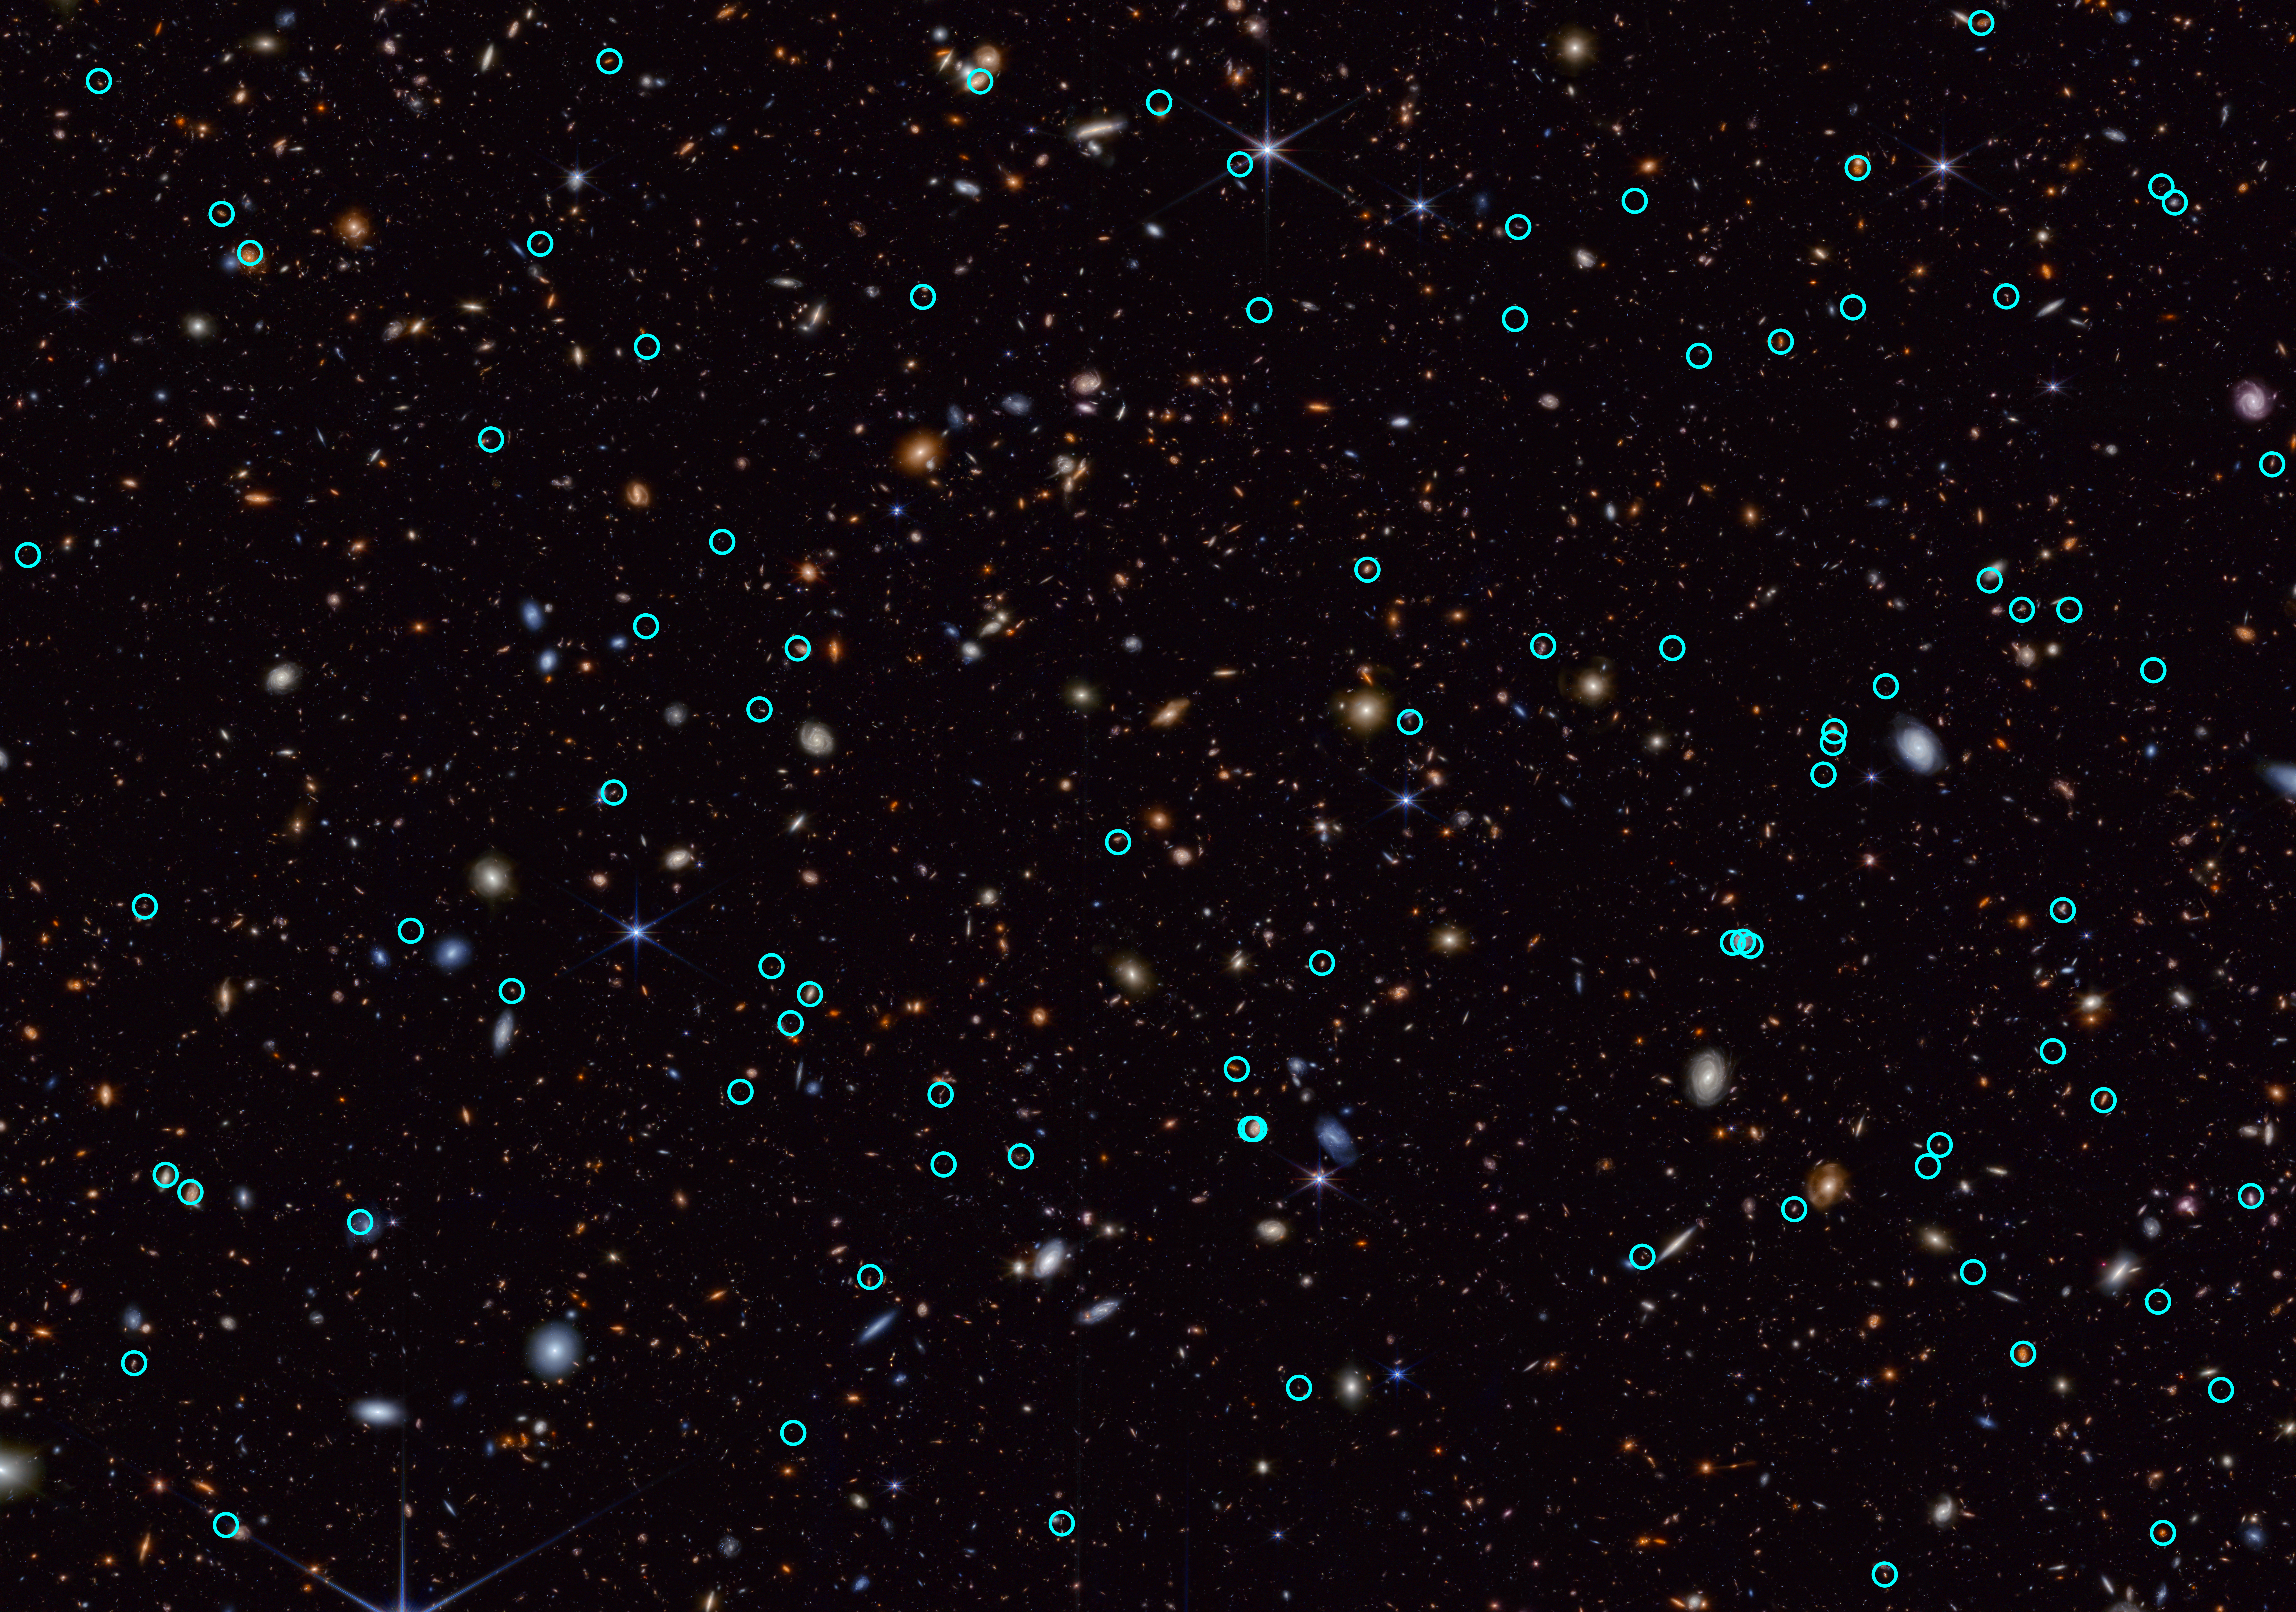

Transients in JADES field

The NASA/ESA/CSA James Webb Space Telescope is giving scientists their first detailed glimpse of supernovae from a time when our Universe was just a small fraction of its current age. A team using Webb data has identified 10 times more supernovae in the early Universe than were previously known. A few of the newfound exploding stars are the most distant examples of their type, including those used to measure the universe’s expansion rate.

To make these discoveries, the team analyzed imaging data obtained as part of the JWST Advanced Deep Extragalactic Survey (JADES) program. Webb is ideal for finding extremely distant supernovae because their light is stretched into longer wavelengths — a phenomenon known as cosmological redshift.

Prior to Webb’s launch, only a handful of supernovae had been found above a redshift of 2, which corresponds to when the universe was only 3.3 billion years old — just 25% of its current age. The JADES sample contains many supernovae that exploded even further in the past, when the universe was less than 2 billion years old. Previously, researchers used the NASA/ESA Hubble Space Telescope to view supernovae from when the universe was in the “young adult” stage. With JADES, scientists are seeing supernovae when the universe was in its “teens” or “pre-teens.” In the future, they hope to look back to the “toddler” or “infant” phase of the universe.

To discover the supernovae, the team compared multiple images taken up to one year apart and looked for sources that disappeared or appeared in those images. These objects that vary in observed brightness over time are called transients, and supernovae are a type of transient. In all, the JADES Transient Survey Sample team uncovered 79 supernovae in a patch of sky only about the thickness of a grain of rice held at arm’s length.

The team identified a number of high-redshift supernovae, including the farthest one ever spectroscopically confirmed, at a redshift of 3.6. Its progenitor star exploded when the universe was only 1.8 billion years old. It is a so-called core-collapse supernova, an explosion of a massive star.

These findings were presented in a press conference at the 244th meeting of the American Astronomical Society in Madison, Wisconsin. Learn more about these results here.

Credit: NASA, ESA, CSA, STScI